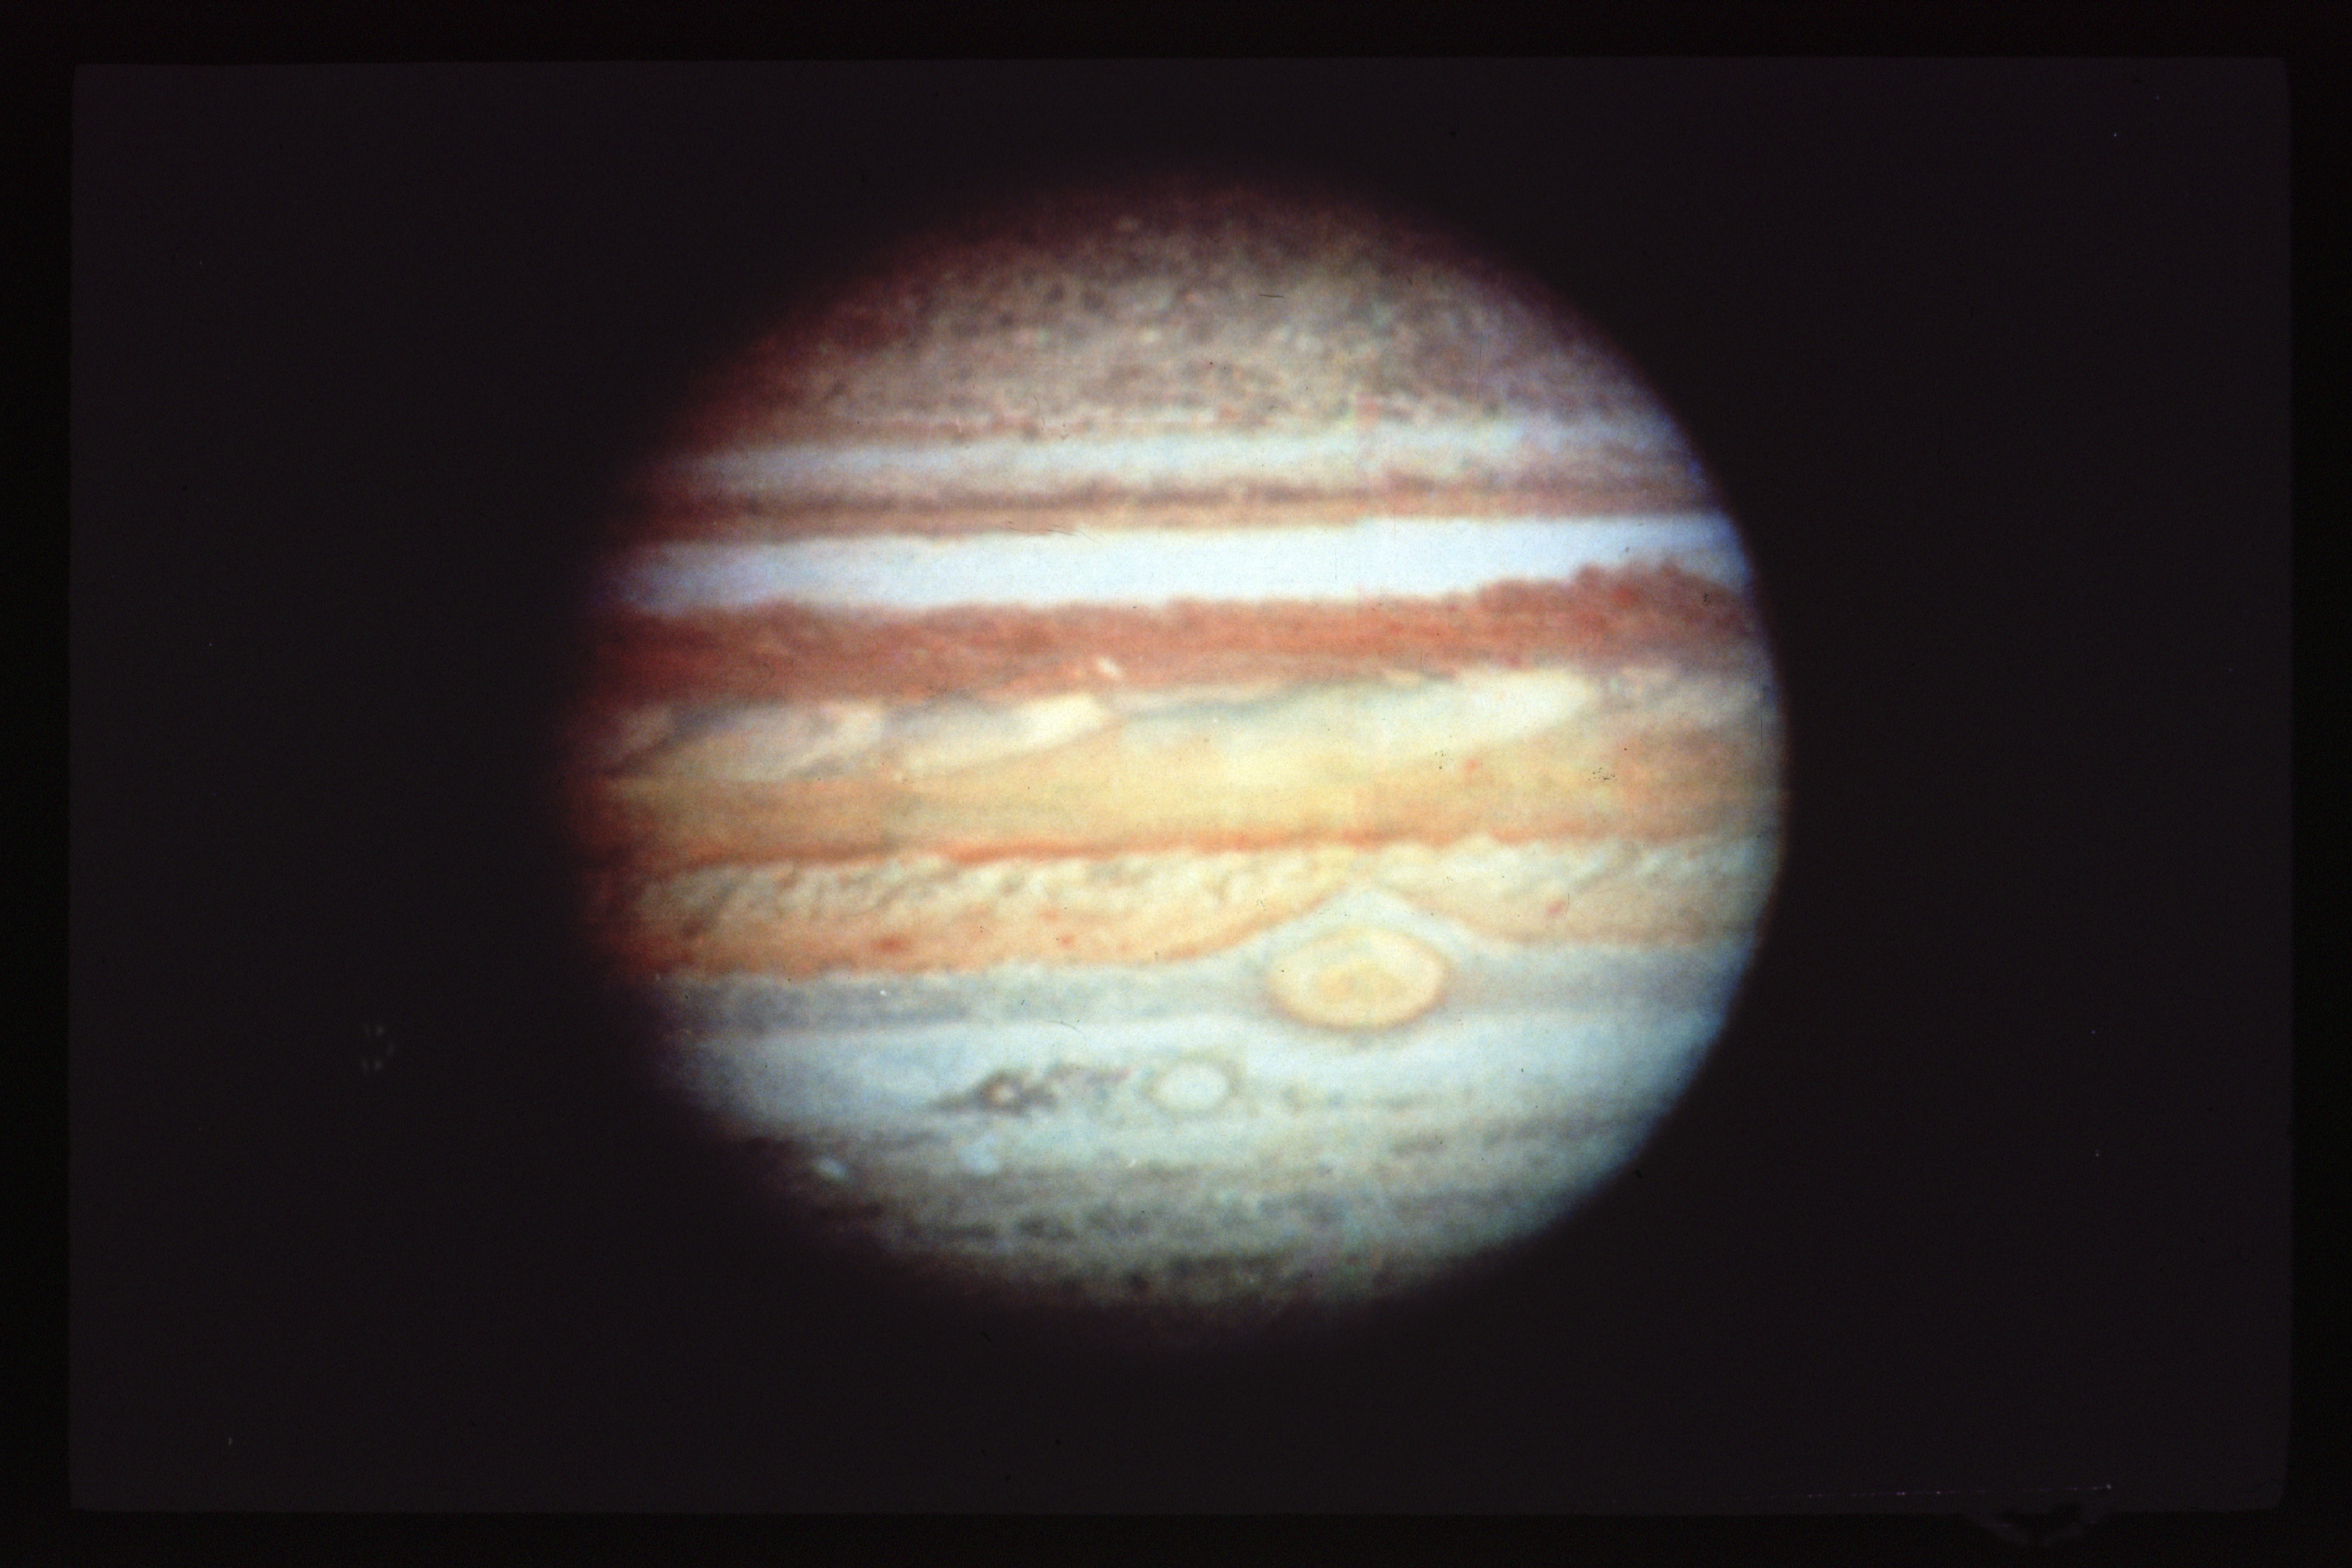

Jupiter

This is a Hubble Space Telescope (HST) image of Jupiter. Notice the Great Red Spot, which is a giant gas storm on Jupiter. This storm is said to be more than 300, 000 years old.

Credit: NASA/ESA